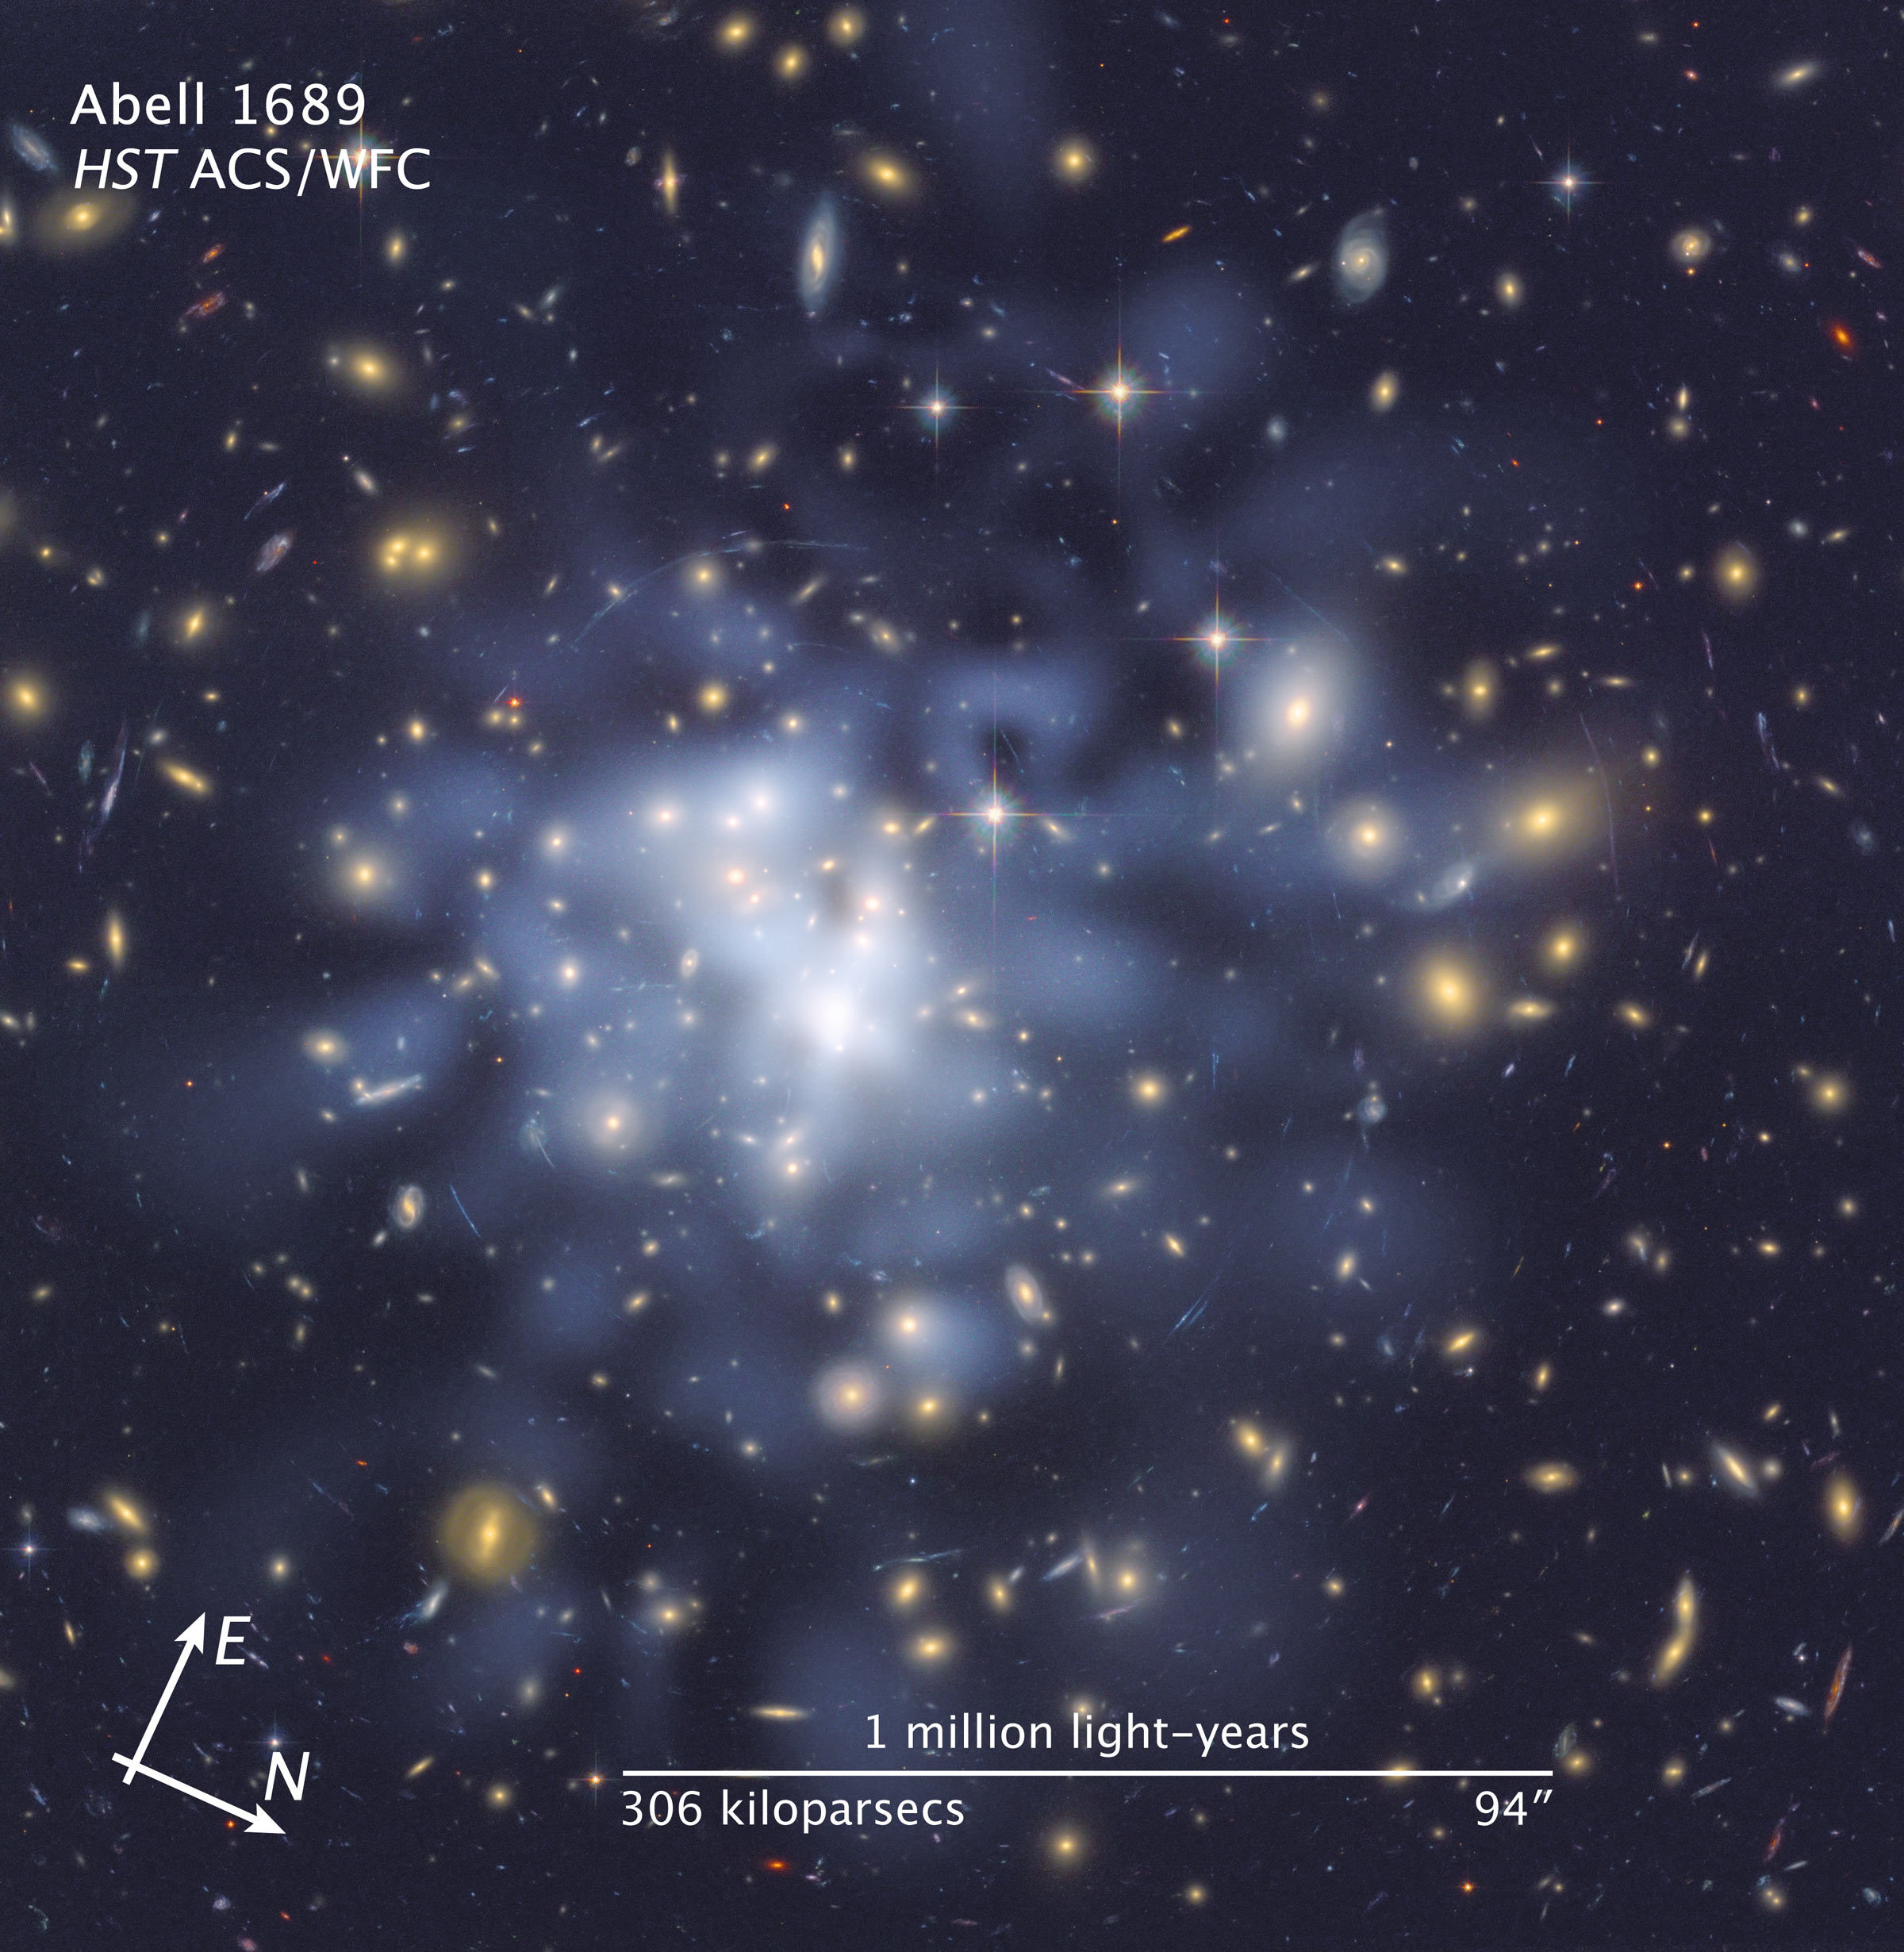

Compass and scale image for Abell 1689 dark matter map

Compass and scale image for Abell 1689 dark matter map.

Credit: NASA, ESA, and Z. Levay (STScI). Science Credit: NASA, ESA, D. Coe (NASA, Jet Propulsion Laboratory/California Institute of Technology, and Space Telescope Science Institute), N. Benítez (Institute of Astrophysics of Andulucía, Spain), T. Broadhurst (University of the Basque Country, Spain), and H. Ford (Johns Hopkins University)